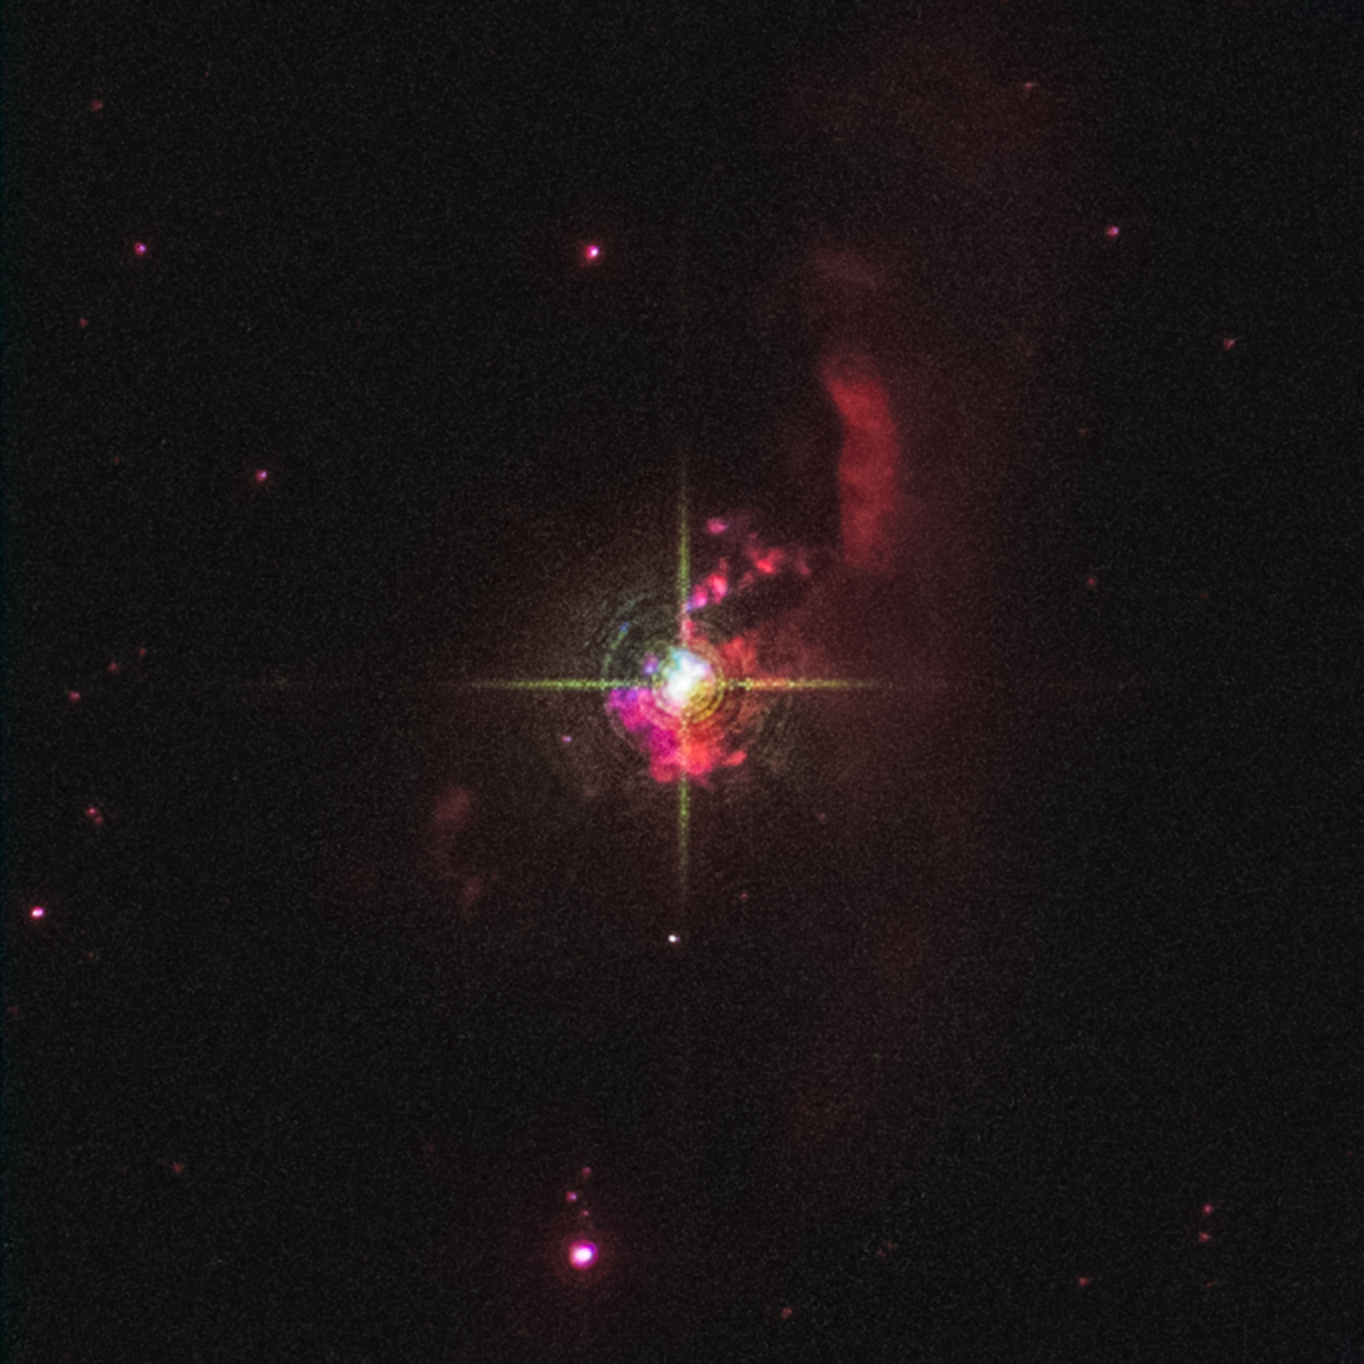

Symbiotic star Mira HM Sge

This is a NASA/ESA Hubble Space Telescope image of the symbiotic star Mira HM Sge. Located 3,400 light-years away in the constellation Sagitta, it consists of a red giant and a white dwarf companion. The stars are too close together to be resolved by Hubble. Material bleeds off the red giant and falls onto the dwarf, making it extremely bright. This system first flared up as a nova in 1975. The red nebulosity is evidence of the stellar wind. The nebula is about one-quarter light-year across.

Astronomers have used new data from Hubble and the retired NASA SOFIA observatory (Stratospheric Observatory for Infrared Astronomy) as well as archival data from other missions to revisit the binary star system.

Between April and September 1975, the binary system HM Sagittae (HM Sge) grew 250 times brighter. Even more unusual, it did not rapidly fade away as novae commonly do, but has maintained its luminosity for decades. Recently, observations show that the system has gotten hotter, but paradoxically faded a little.

The 2021 ultraviolet data from Hubble showed a strong emission line of highly ionised magnesium that was not present in earlier published spectra from 1990. Its presence shows that the estimated temperature of the white dwarf and accretion disk increased from less than 220,000 degrees Celsius in 1989 to greater than 250,000 degrees Celsius now. The highly ionised magnesium line is one of many seen in the UV spectrum, which analysed together will reveal the energetics of the system, and how it has changed in the last three decades.

With data from NASA's flying telescope SOFIA, which retired in 2022, the team was able to detect the water, gas, and dust flowing in and around the system. Infrared spectral data shows that the giant star, which produces copious amounts of dust, returned to its normal behaviour within only a couple years of the explosion, but also that it has dimmed in recent years, which is another puzzle to be explained. With SOFIA astronomers were able to see water moving at around 28 kilometres per second, which they suspect is the speed of the sizzling accretion disk around the white dwarf. The bridge of gas connecting the giant star to the white dwarf must presently span about 3.2 billion kilometres.

Credit: NASA, ESA, R. Sankrit (STScI), S. Goldman (STScI), J. DePasquale (STScI)